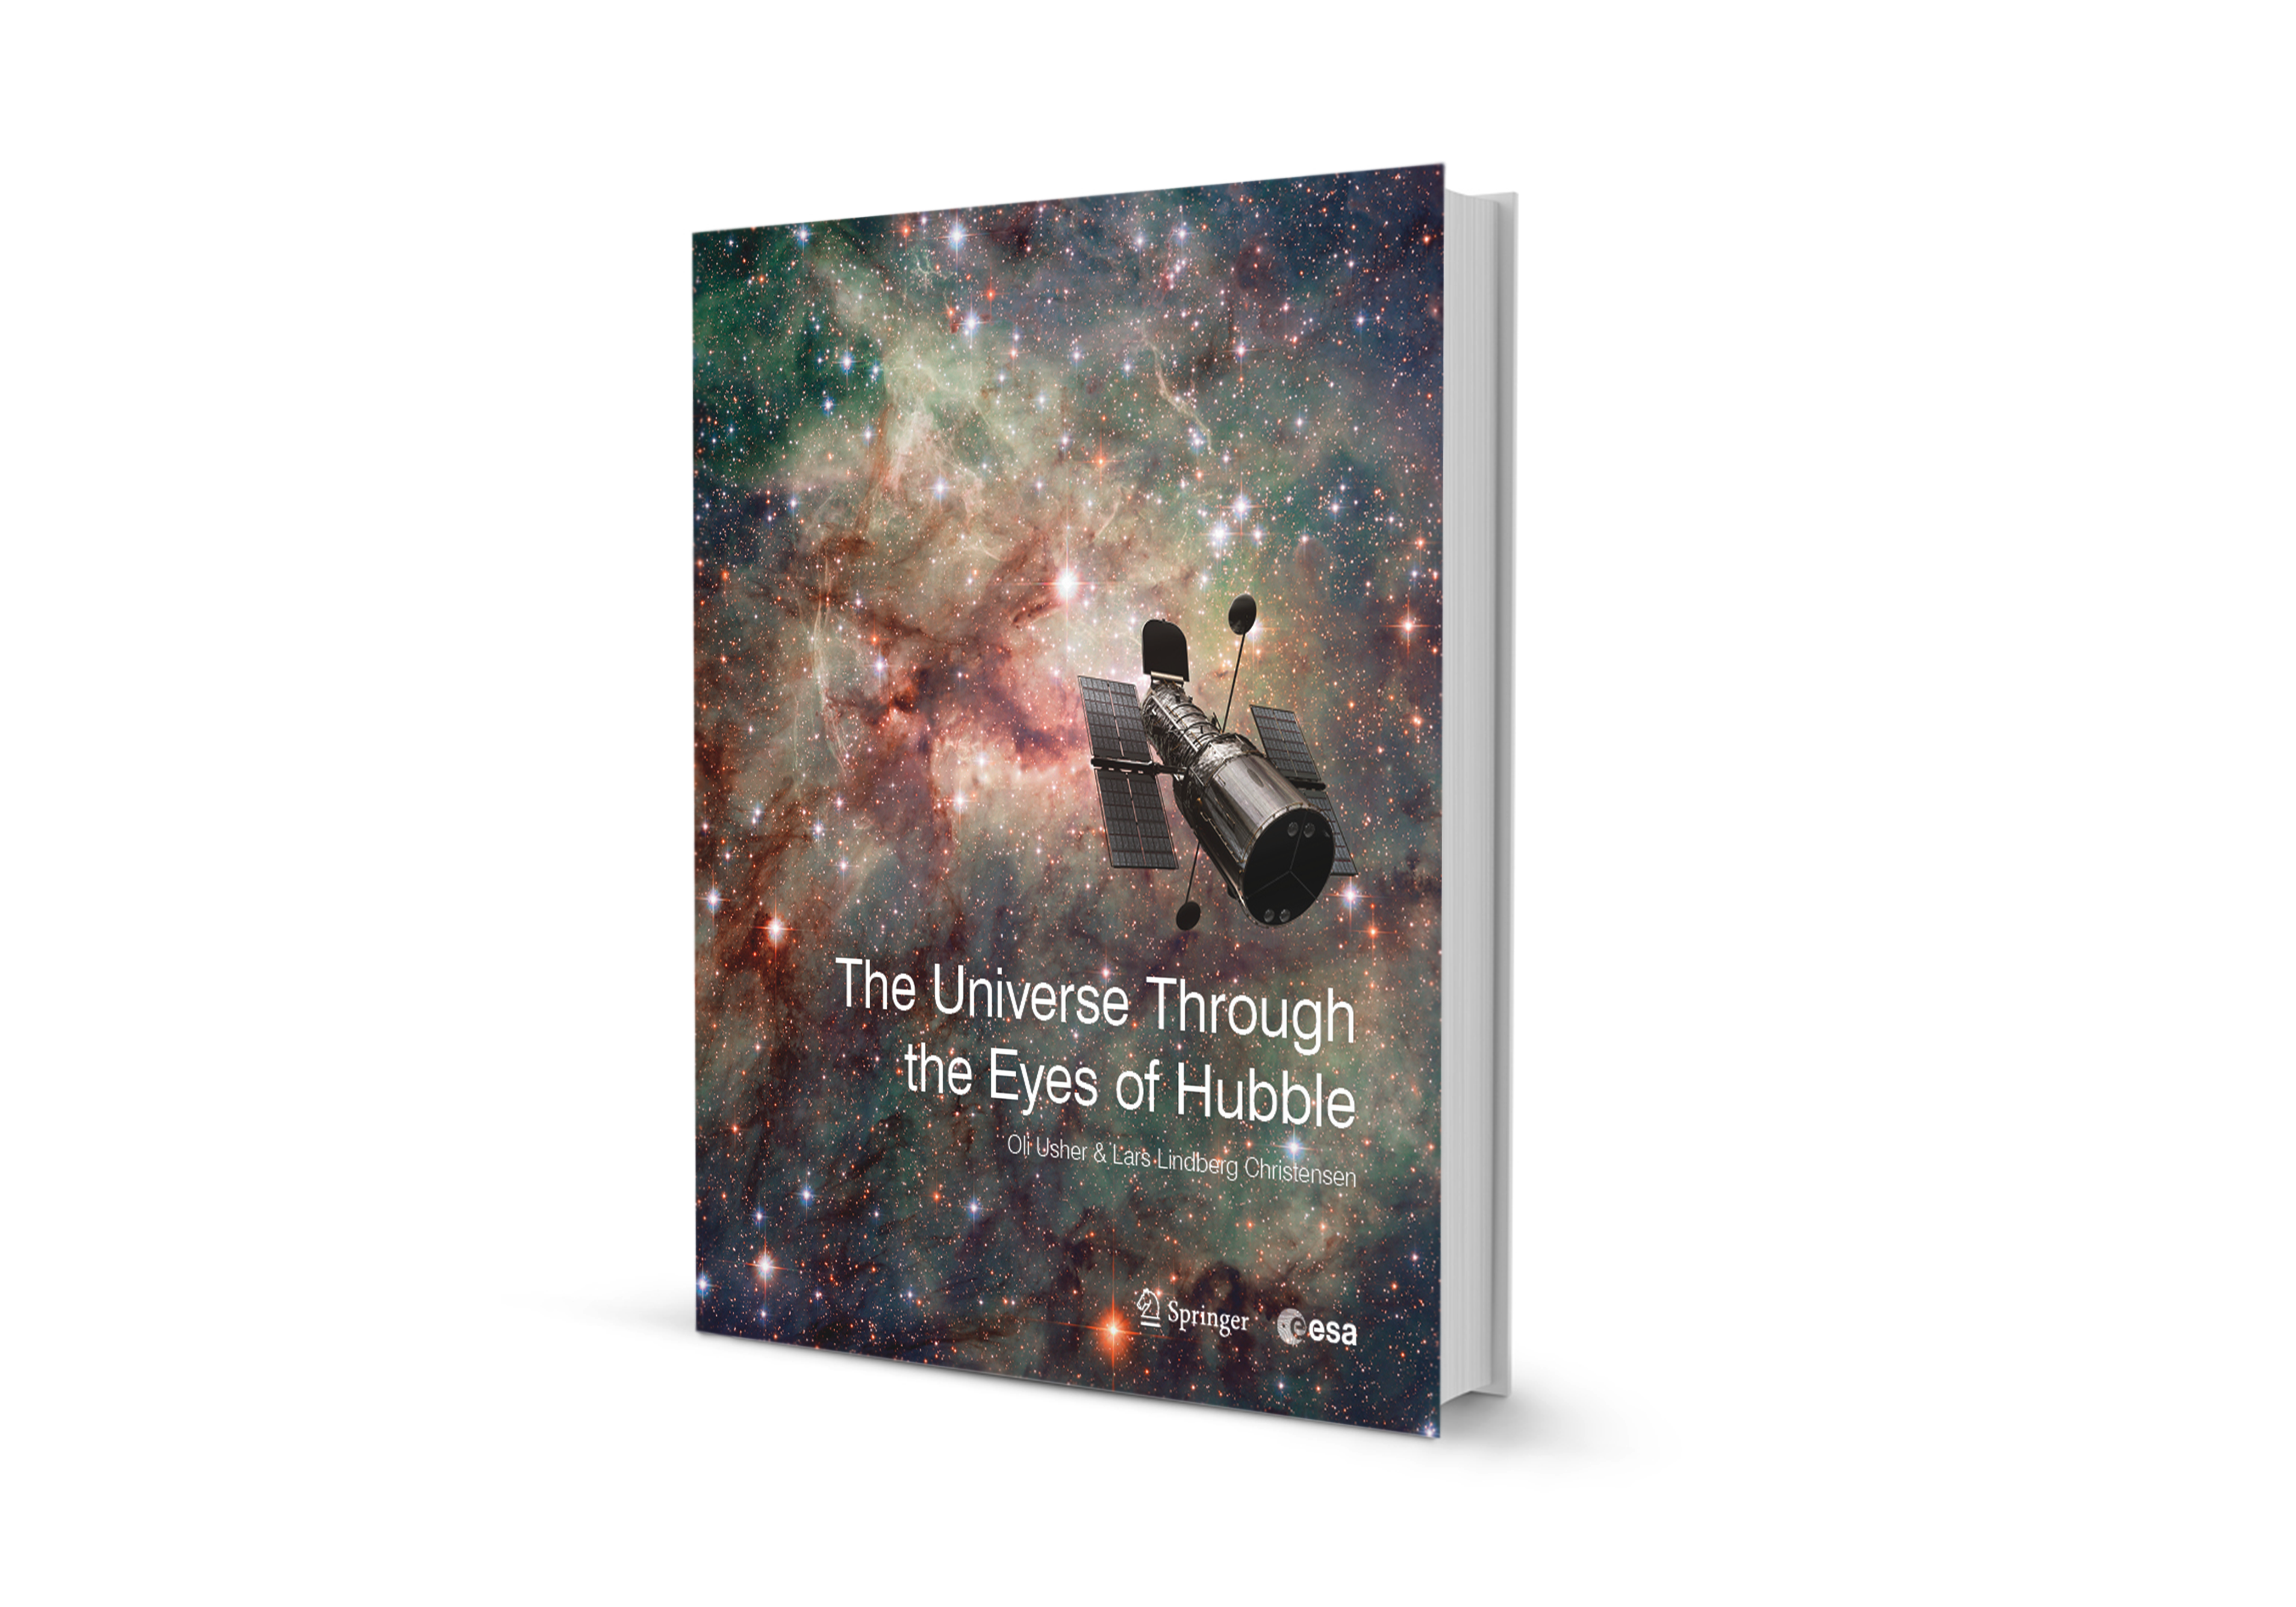

Book: “The Universe Through the Eyes of Hubble”

Cover of the book "The Universe Through the Eyes of Hubble"

Credit: NASA & ESA